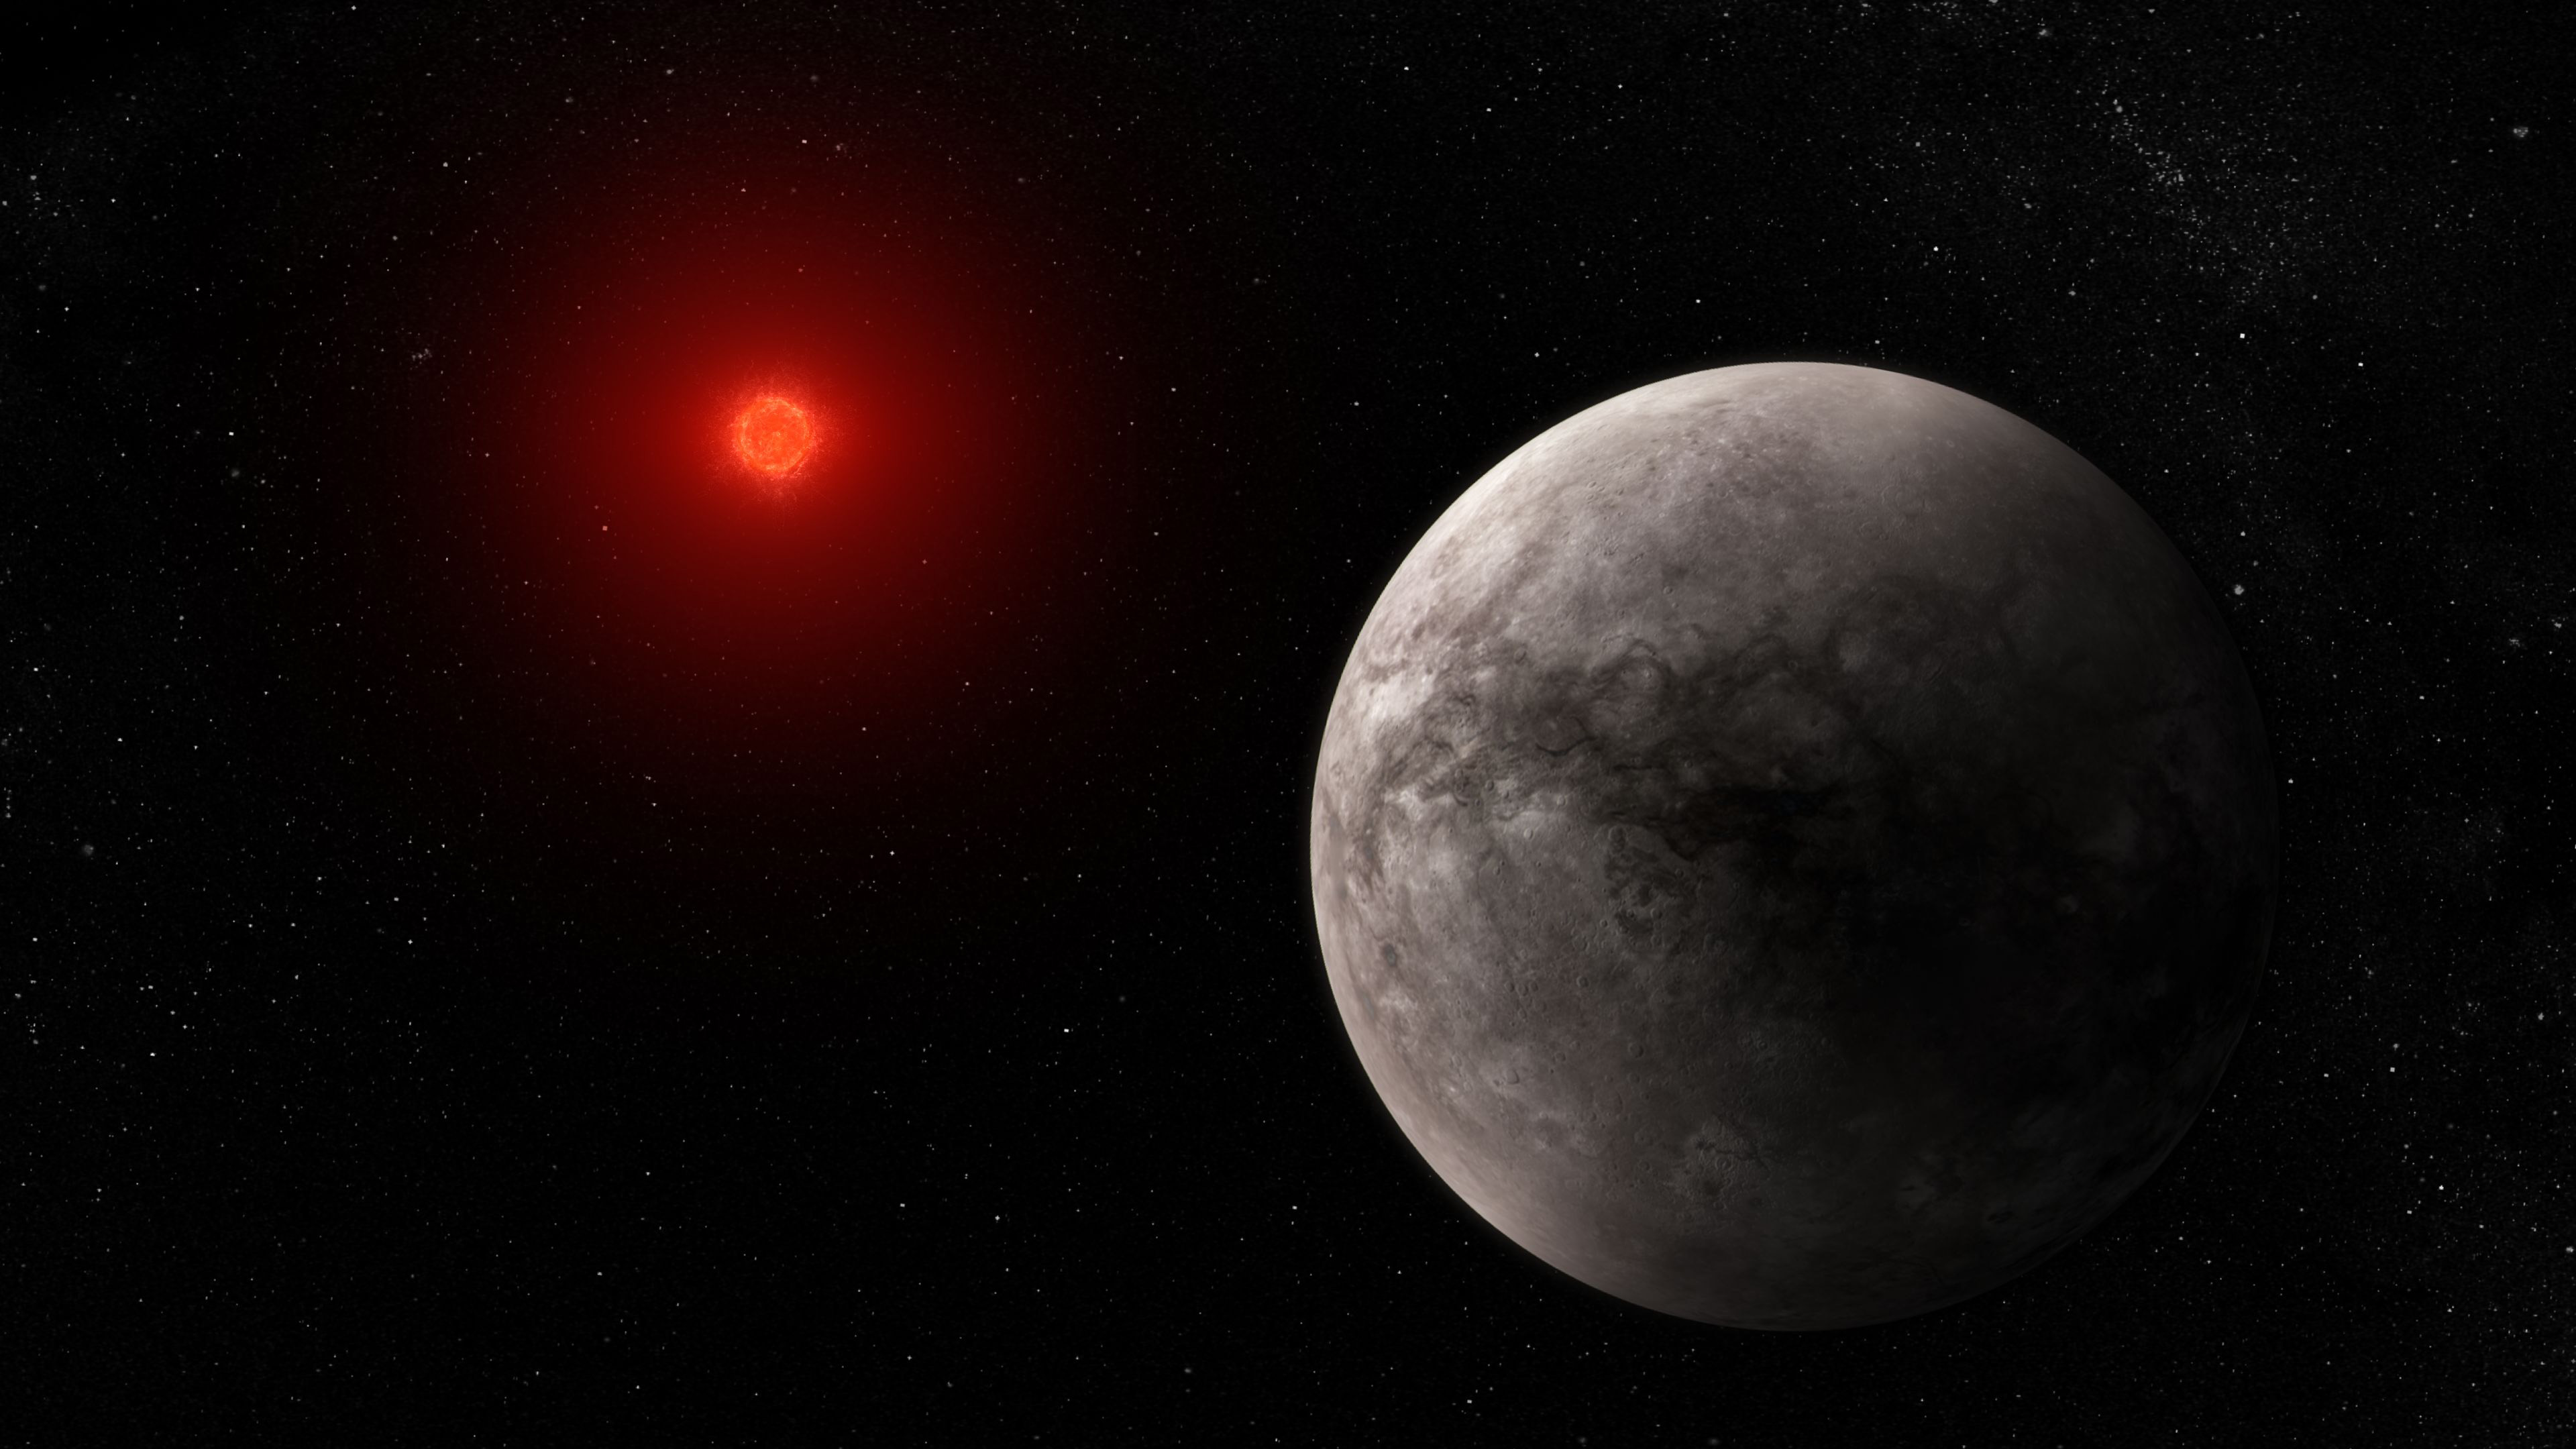

Rocky exoplanet TRAPPIST-1 b (illustration)

Illustration showing what the hot rocky exoplanet TRAPPIST-1 b could look like. TRAPPIST-1 b, the innermost of seven known planets in the TRAPPIST-1 system, orbits its star at a distance of 0.011 AU, completing one circuit in just 1.51 Earth-days. TRAPPIST-1 b is slightly larger than Earth, but has around the same density, which indicates that it must have a rocky composition. Webb’s measurement of mid-infrared light given off by TRAPPIST-1 b suggests that the planet does not have any substantial atmosphere. The star, TRAPPIST-1, is an ultracool red dwarf (M dwarf) with a temperature of only 2566 K and a mass just 0.09 times the mass of the Sun.

This illustration is based on new data gathered by Webb’s Mid-Infrared Instrument (MIRI) as well as previous observations from other ground- and space-based telescopes. Webb has not captured any images of the planet.

MIRI was developed as a partnership between Europe and the USA: the main partners are ESA, a consortium of nationally funded European institutes, the Jet Propulsion Laboratory (JPL) and the University of Arizona. The instrument was nationally funded by the European Consortium under the auspices of the European Space Agency.

Credit: NASA, ESA, CSA, J. Olmsted (STScI), T. P. Greene (NASA Ames), T. Bell (BAERI), E. Ducrot (CEA), P. Lagage (CEA)